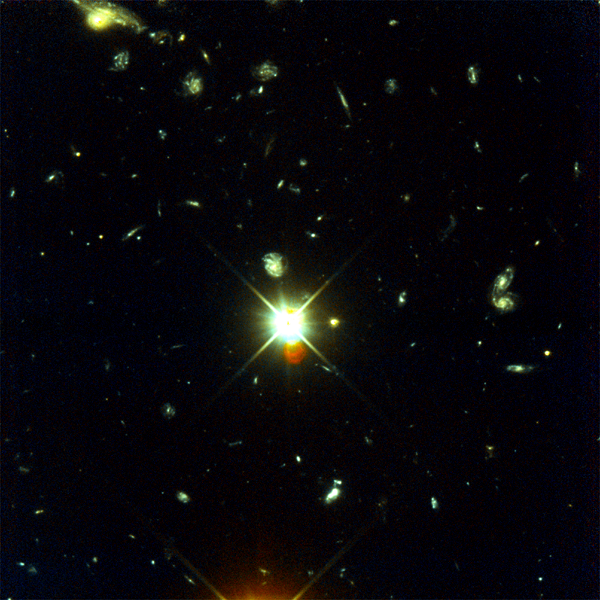

Hubble Deep Field South Unveils Myriad Galaxies

The deepest visible/ultraviolet light image of the universe ever taken, revealing galaxies down to 30th magnitude.

Credit: R. Williams (STScI), the HDF-S Team, and NASA/ESA